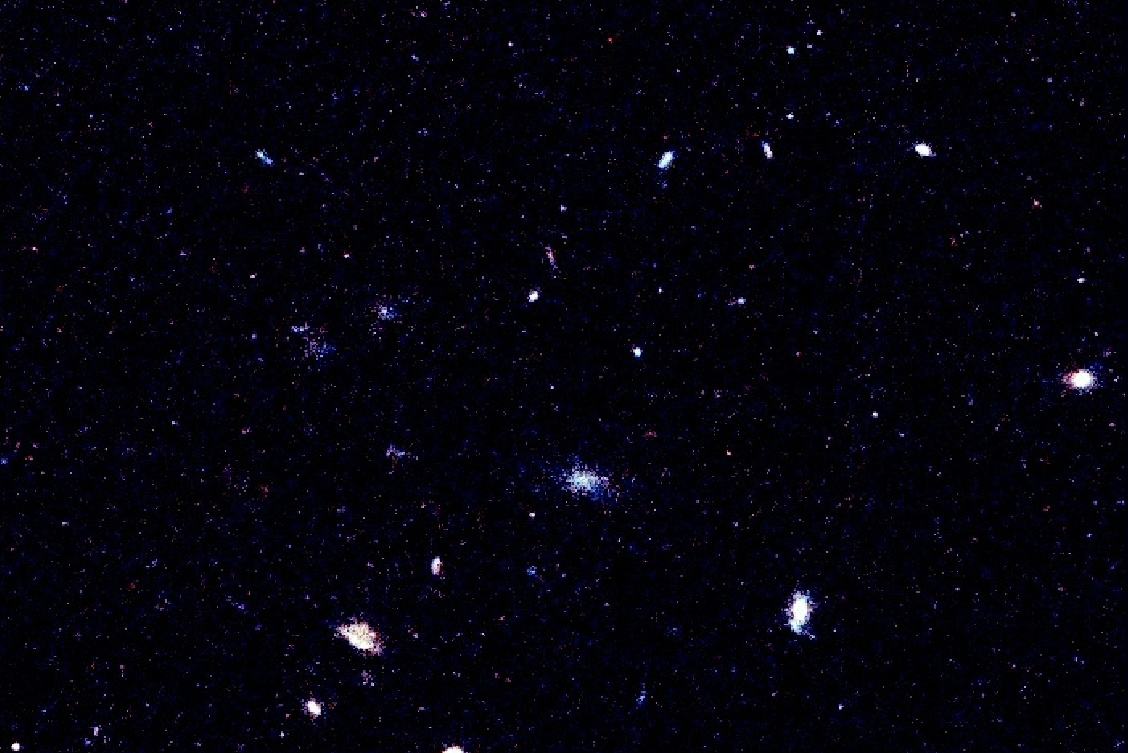

Good bye dark age

Researchers using the NASA/ESA Hubble Space Telescope believe they are seeing the conclusion of the cosmic epoch where the young galaxies started to shine in significant numbers. This marks a time when the so-called 'Dark Ages' of the universe was completed, about 13 billion years ago (based on an estimate of 14 billion years for the current age of the universe).

Credit: NASA/ESA, H.-J. Yan, R. Windhorst and S. Cohen (Arizona State University)